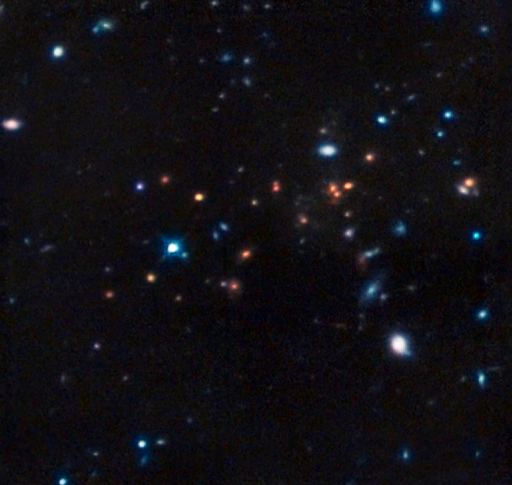

The most remote mature cluster of galaxies yet found

This image from the Near Infrared Camera and Multi-Object Spectrometer (NICMOS) onboard the NASA/ESA Hubble Space Telescope shows CL J1449+0856, the most distant mature cluster of galaxies found. The image was taken in infrared light, with colour data added from ESO’s Very Large Telescope and NAOJ’s Subaru Telescope.

Credit: NASA, ESA, R. Gobat (Laboratoire AIM-Paris-Saclay, CEA/DSM-CNRS–Université Paris Diderot)